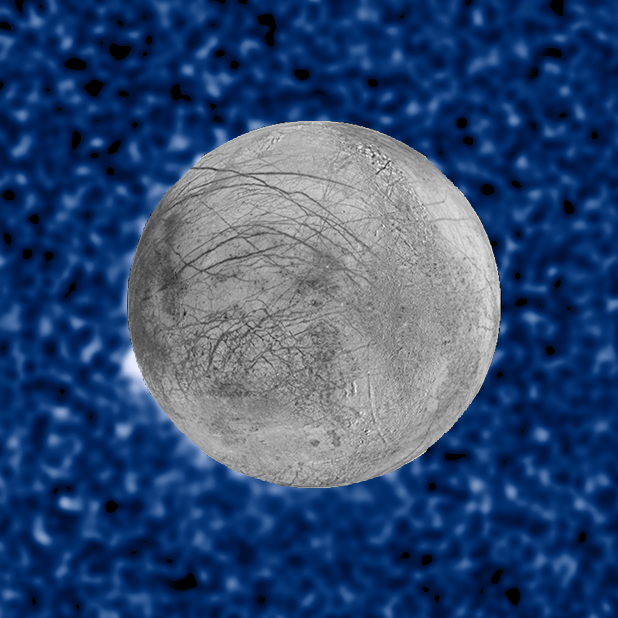

Plume Erupting From Europa – 17 March 2014

These composite image shows a suspected plume of material erupting from Jupiter's icy moon Europa. The plume, photographed in ultraviolet light by the NASA/ESA Hubble Space Telescope, was seen in silhouette as the moon passed in front of Jupiter.

The plume was observed on 17 March 2014 and is estimated to be about 40 kilometres high. The snapshot of Europa, superimposed on the Hubble image, was assembled from data from NASA's Galileo mission to Jupiter.

Credit: NASA, ESA, W. Sparks (STScI), and the USGS Astrogeology Science Center